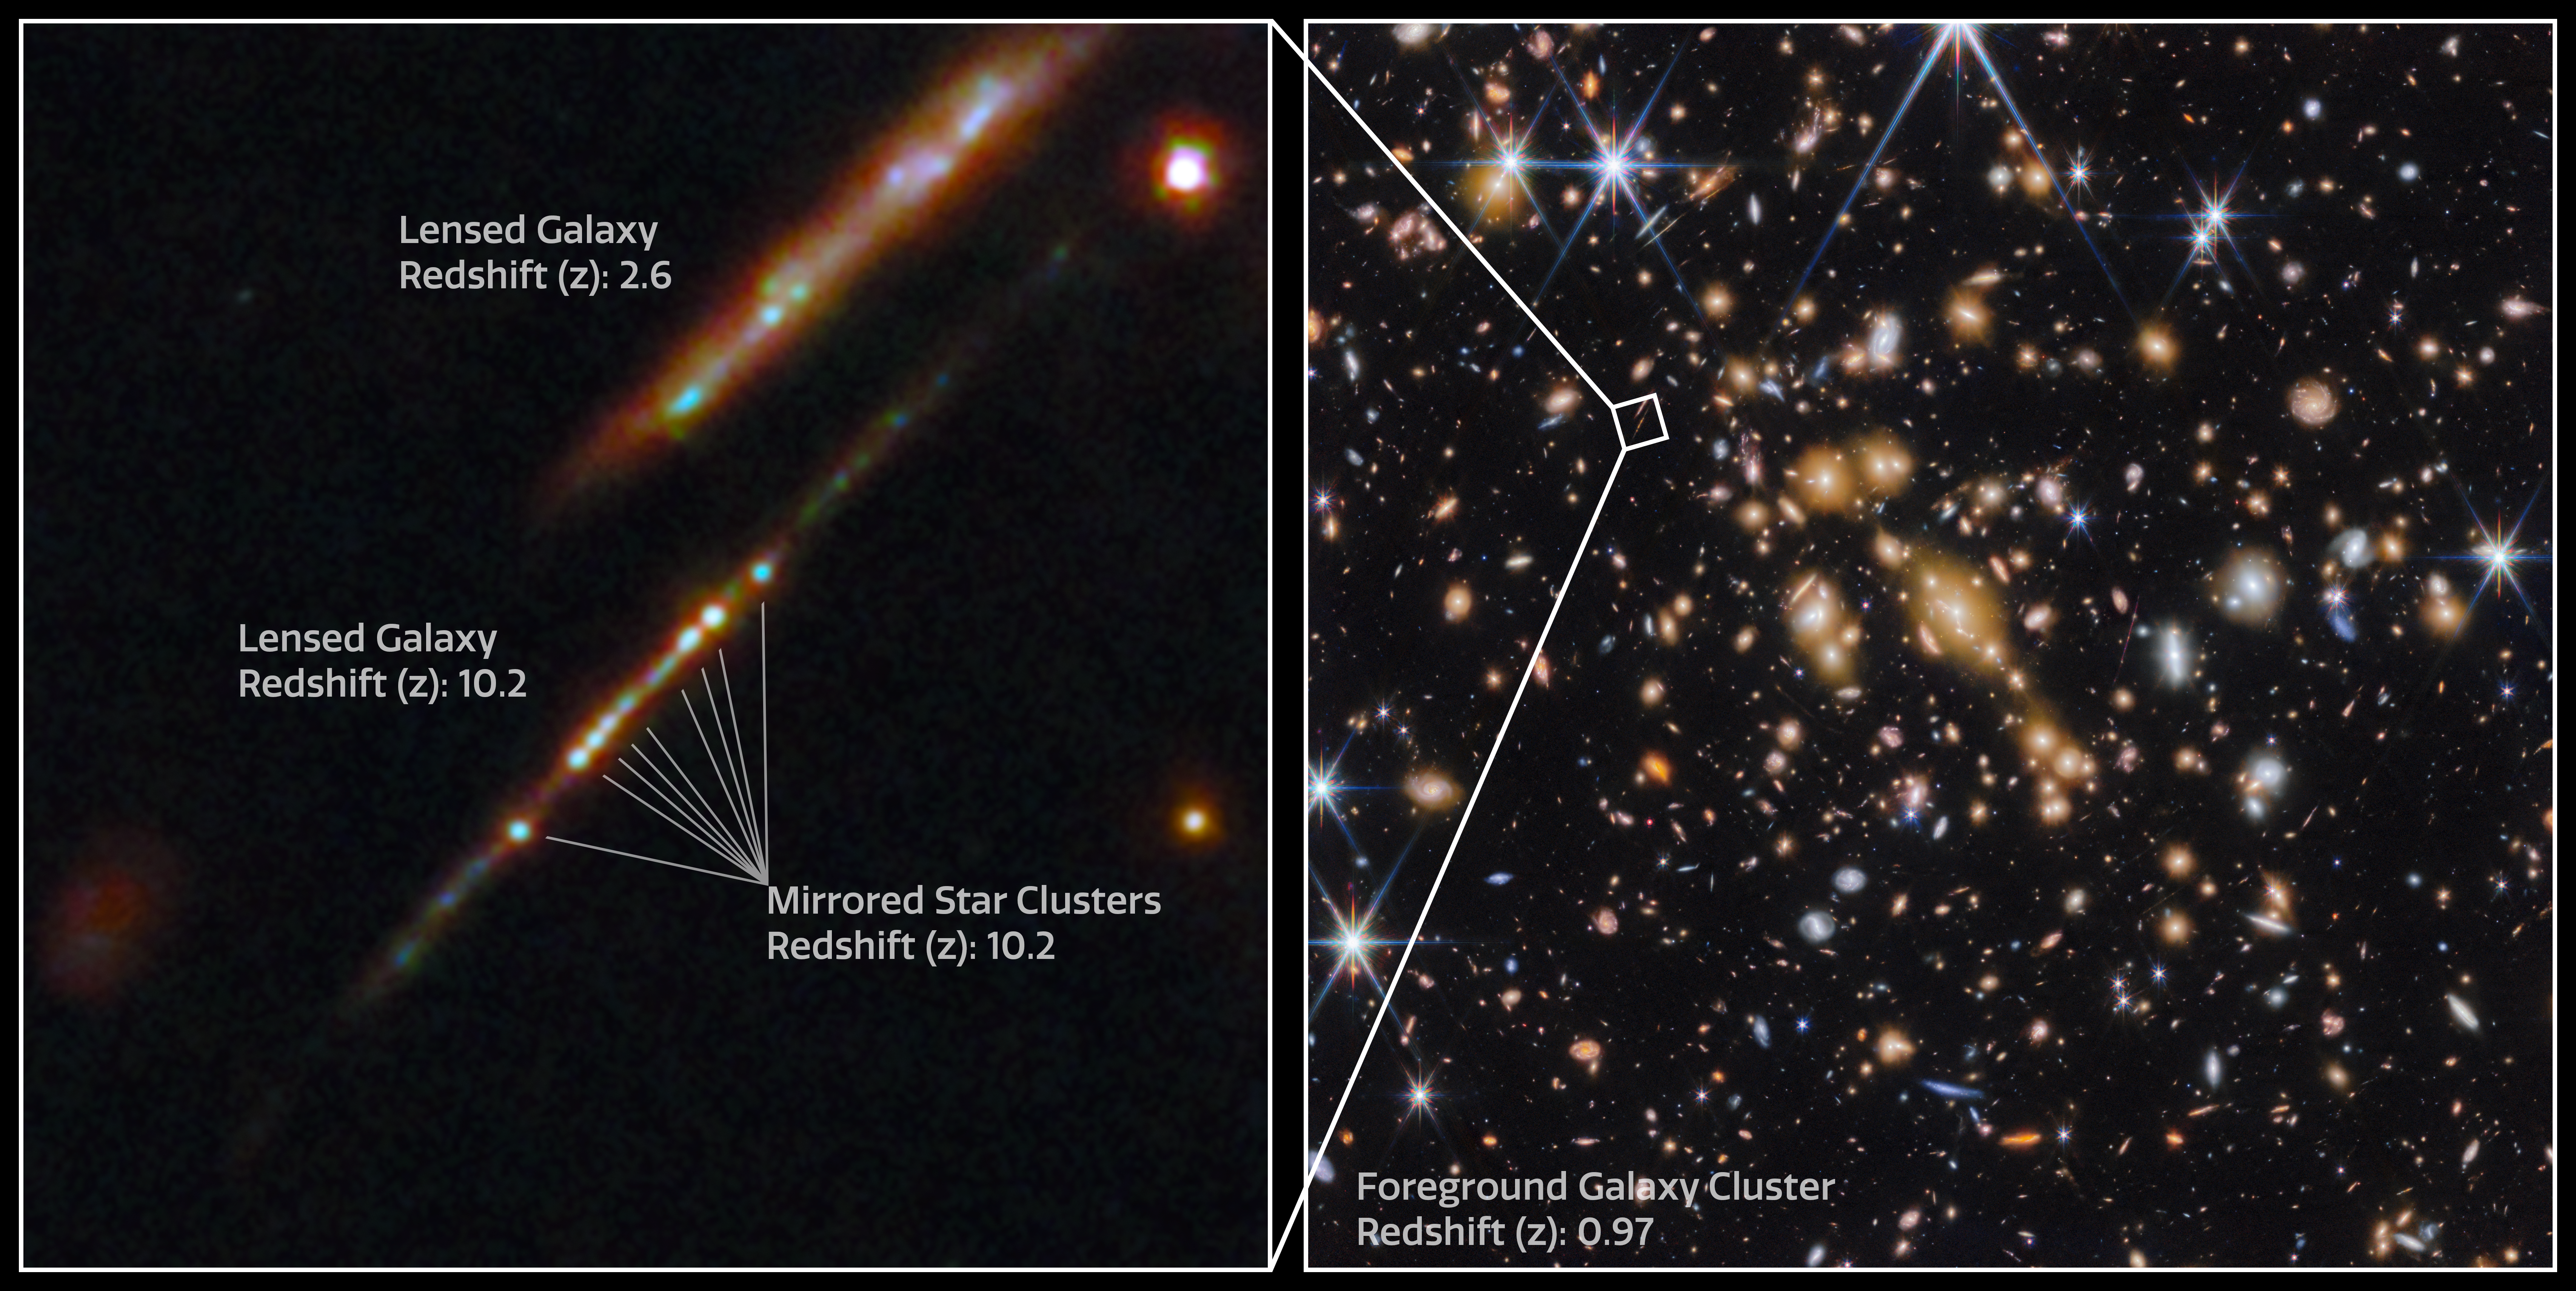

Star clusters in the Cosmic Gems arc (annotated)

An international team of astronomers have used the NASA/ESA/CSA James Webb Space Telescope to discover gravitationally bound star clusters when the Universe was 460 million years old. This is the first discovery of star clusters in an infant galaxy less than 500 million years after the Big bang.

Young galaxies in the early Universe underwent significant burst phases of star formation, generating substantial amounts of ionising radiation. However, because of their cosmological distances, direct studies of their stellar content have proven challenging. Using Webb, an international team of astronomers have now detected five young massive star clusters in the Cosmic Gems arc (SPT0615-JD1), a strongly-lensed galaxy emitting light when the Universe was roughly 460 million years old, looking back across 97% of cosmic time.

The Cosmic Gems arc was initially discovered in NASA/ESA Hubble Space Telescope images obtained by the RELICS (Reionization Lensing Cluster Survey) programme of the lensing galaxy cluster SPT-CL J0615−5746.

With Webb, the science team can now see where stars formed and how they are distributed, in a similar way to how the Hubble Space Telescope is used to study local galaxies. Webb’s view provides a unique opportunity to study star formation and the inner workings of infant galaxies at such an unprecedented distance.

Credit: ESA/Webb, NASA & CSA, L. Bradley (STScI), A. Adamo (Stockholm University) and the Cosmic Spring collaboration